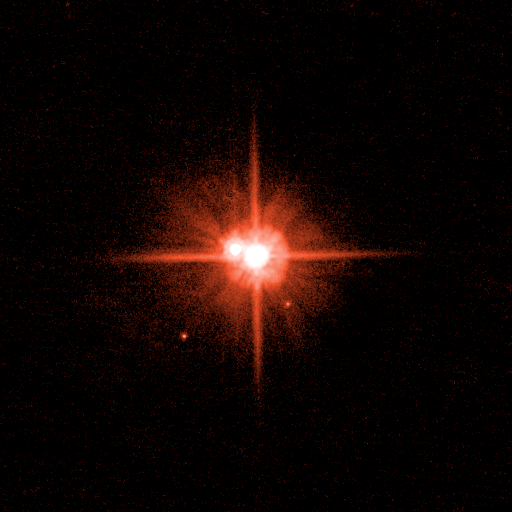

Pluto System: March 2, 2006 (Red Filter)

This image (with filter applied) taken from the original black and white photo, and represents the range of brightness recorded by the ACS/HRC camera.

Credit: NASA, ESA, H. Weaver (Johns Hopkins University/Applied Physics Lab), A. Stern (Southwest Research Institute), and the HST Pluto Companion Search Team